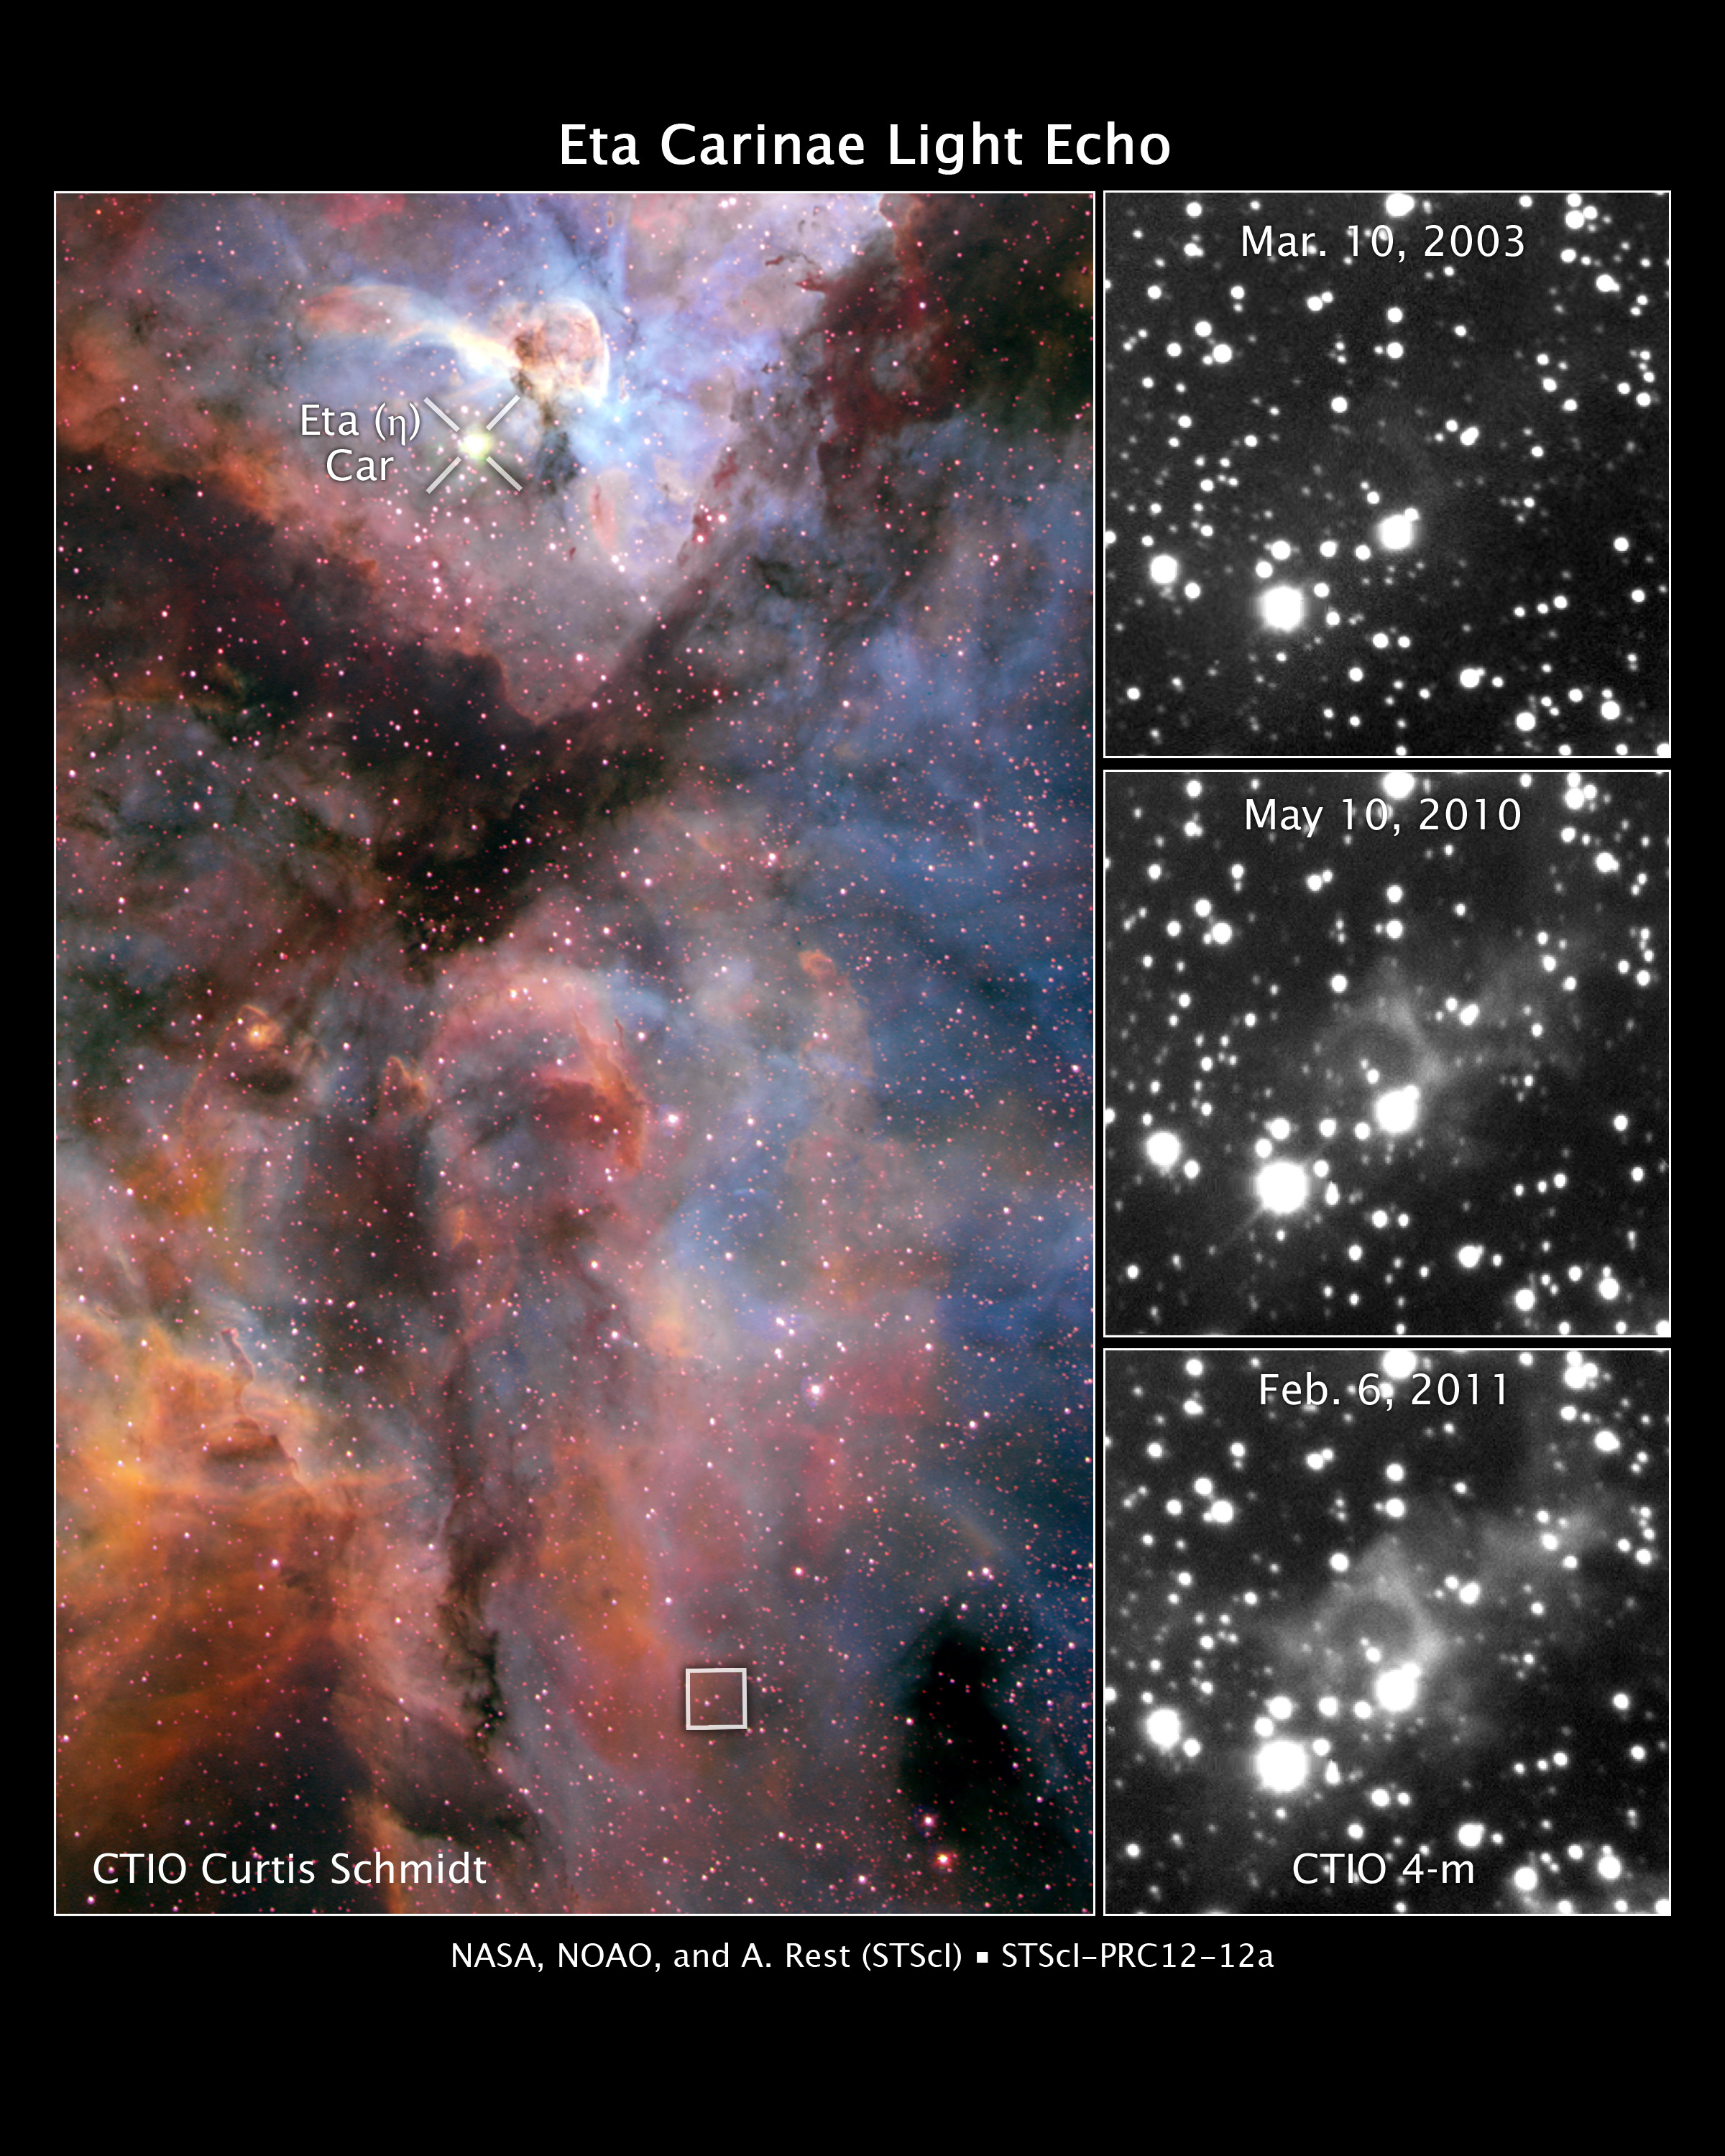

Eta Carinae light echo

These images reveal light from a massive stellar outburst in the Carina Nebula reflecting off dust clouds surrounding a behemoth double-star system.

The colour image at left shows the Carina Nebula, a star-forming region located 7500 light-years from Earth. The massive double-star system Eta Carinae resides near the top of the image. The star system, about 120 times more massive than the Sun, produced a spectacular outburst that was seen on Earth from 1837 to 1858.

But some of the light from the eruption took an indirect path and is just now reaching our planet. The light bounced off dust clouds (the boxed region about 100 light-years away at the bottom of the image) and was rerouted to Earth, a phenomenon called a light echo. The image was taken in February 2000 by the U.S. National Optical Astronomy Observatory's Curtis Schmidt Telescope at the Cerro Tololo Inter-American Observatory (CTIO) in Chile.

The three black-and-white images at right show light from the eruption illuminating dust clouds near the doomed star system as it moves through them. The effect is like shining a flashlight on different regions of a vast cavern. The images were taken over an eight-year span by the U.S. National Optical Astronomy Observatory's Blanco 4-meter telescope at the CTIO.

Credit: NASA, NOAO, and A. Rest (Space Telescope Science Institute, Baltimore, USA). Acknowledgment: NOAO, AURA, NSF, and N. Smith (University of Arizona)